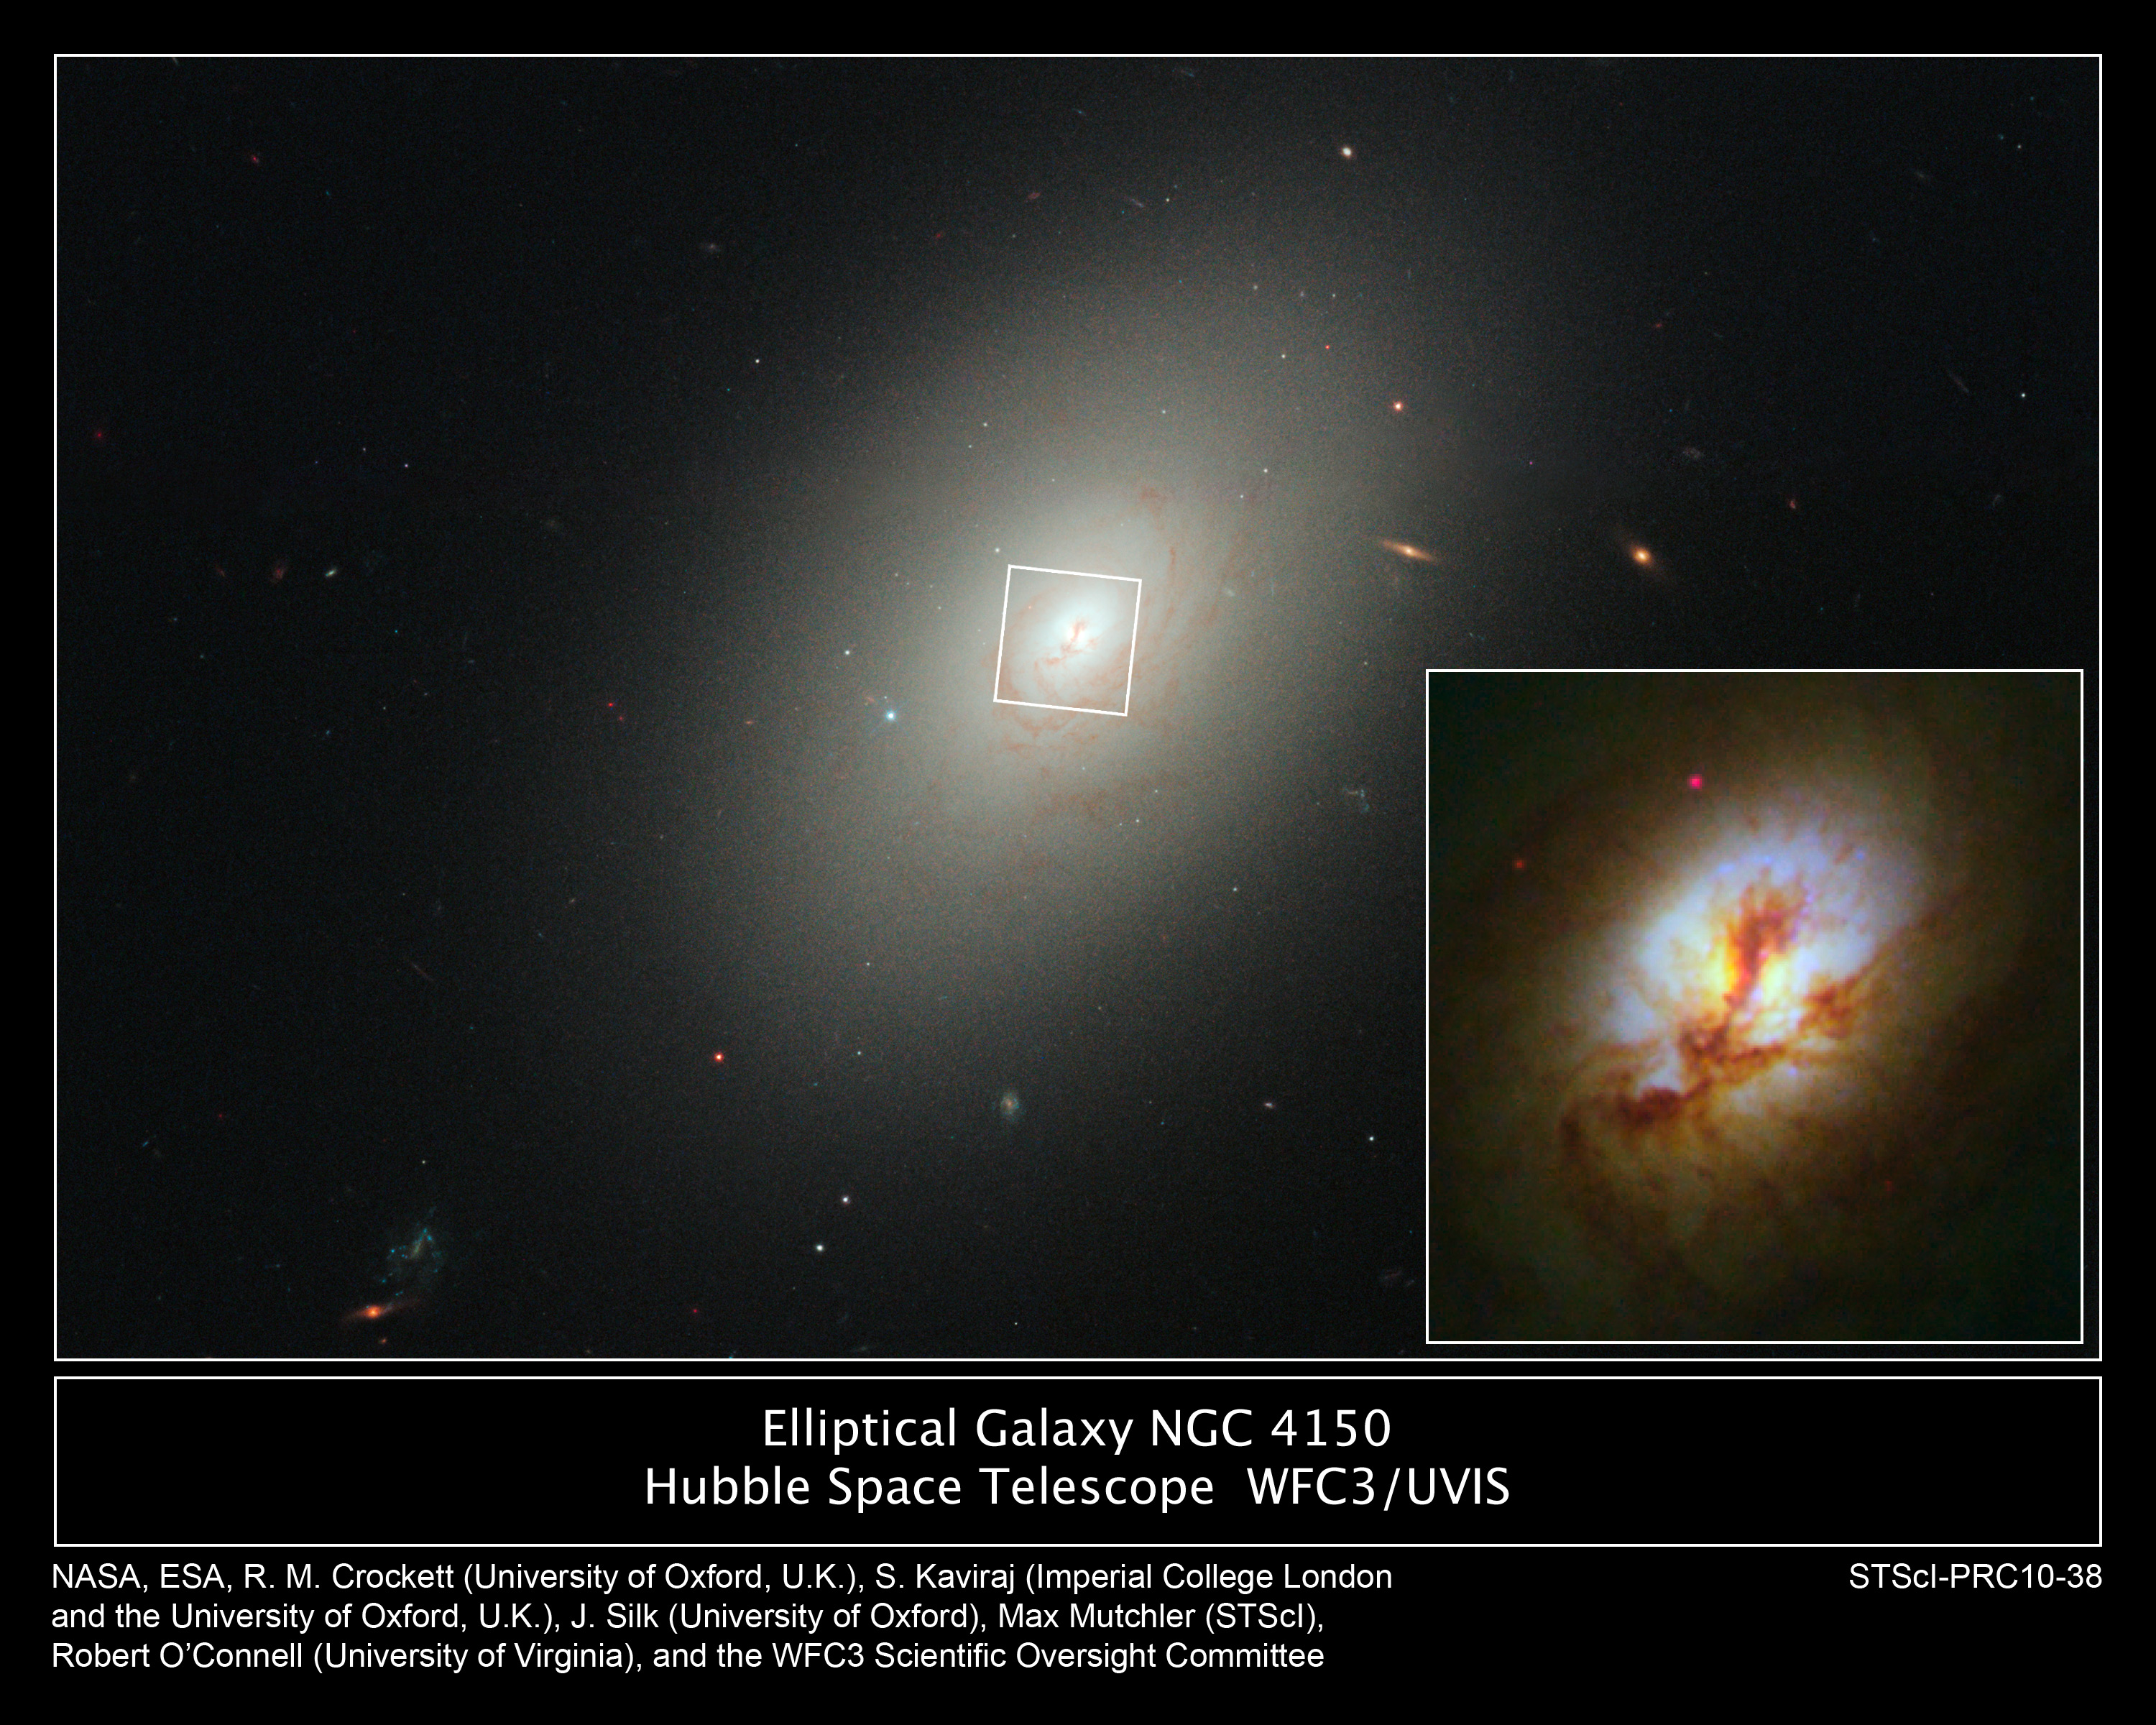

Hubble spies young stars in ancient galaxy's core

These images, taken with the NASA/ESA Hubble Space Telescope, reveal fresh star birth in the ancient elliptical galaxy NGC 4150, located about 44 million light-years away.

The images combine observations taken in visible and near-ultraviolet light with Hubble's Wide Field Camera 3. Ultraviolet light traces the glow of young stars.

In the large-scale image, NGC 4150 looks very much like a typical elliptical galaxy. The dark strands of dust in the centre, however, provide tentative evidence of a recent galaxy merger. The inset image shows a magnified view of the chaotic activity inside the galaxy's core. Those regions within about 650 light-years of the centre that are not obscured by dust appear bright in near-ultraviolet light (shown here in blue). The blue areas indicate a flurry of recent star birth. The stellar breeding ground is about 1,300 light-years across. The stars in this area are less than a billion years old. By comparison, most of the stars in the galaxy are about 10 billion years old. These young stars most likely formed during an encounter with a smaller galaxy that was about one-twentieth the mass of NGC 4150.

The Hubble observations bolster the emerging view that ancient elliptical galaxies like NGC 4150 harbor a significant amount of recent, merger-driven star formation.

The images were taken 30 October and 9 November 2009.

Credit: NASA, ESA, R.M. Crockett (University of Oxford, U.K.), S. Kaviraj (Imperial College London and University of Oxford, U.K.), J. Silk (University of Oxford), M. Mutchler (Space Telescope Science Institute, Baltimore, USA), R. O'Connell (University of Virginia, Charlottesville, USA), and the WFC3 Scientific Oversight Committee